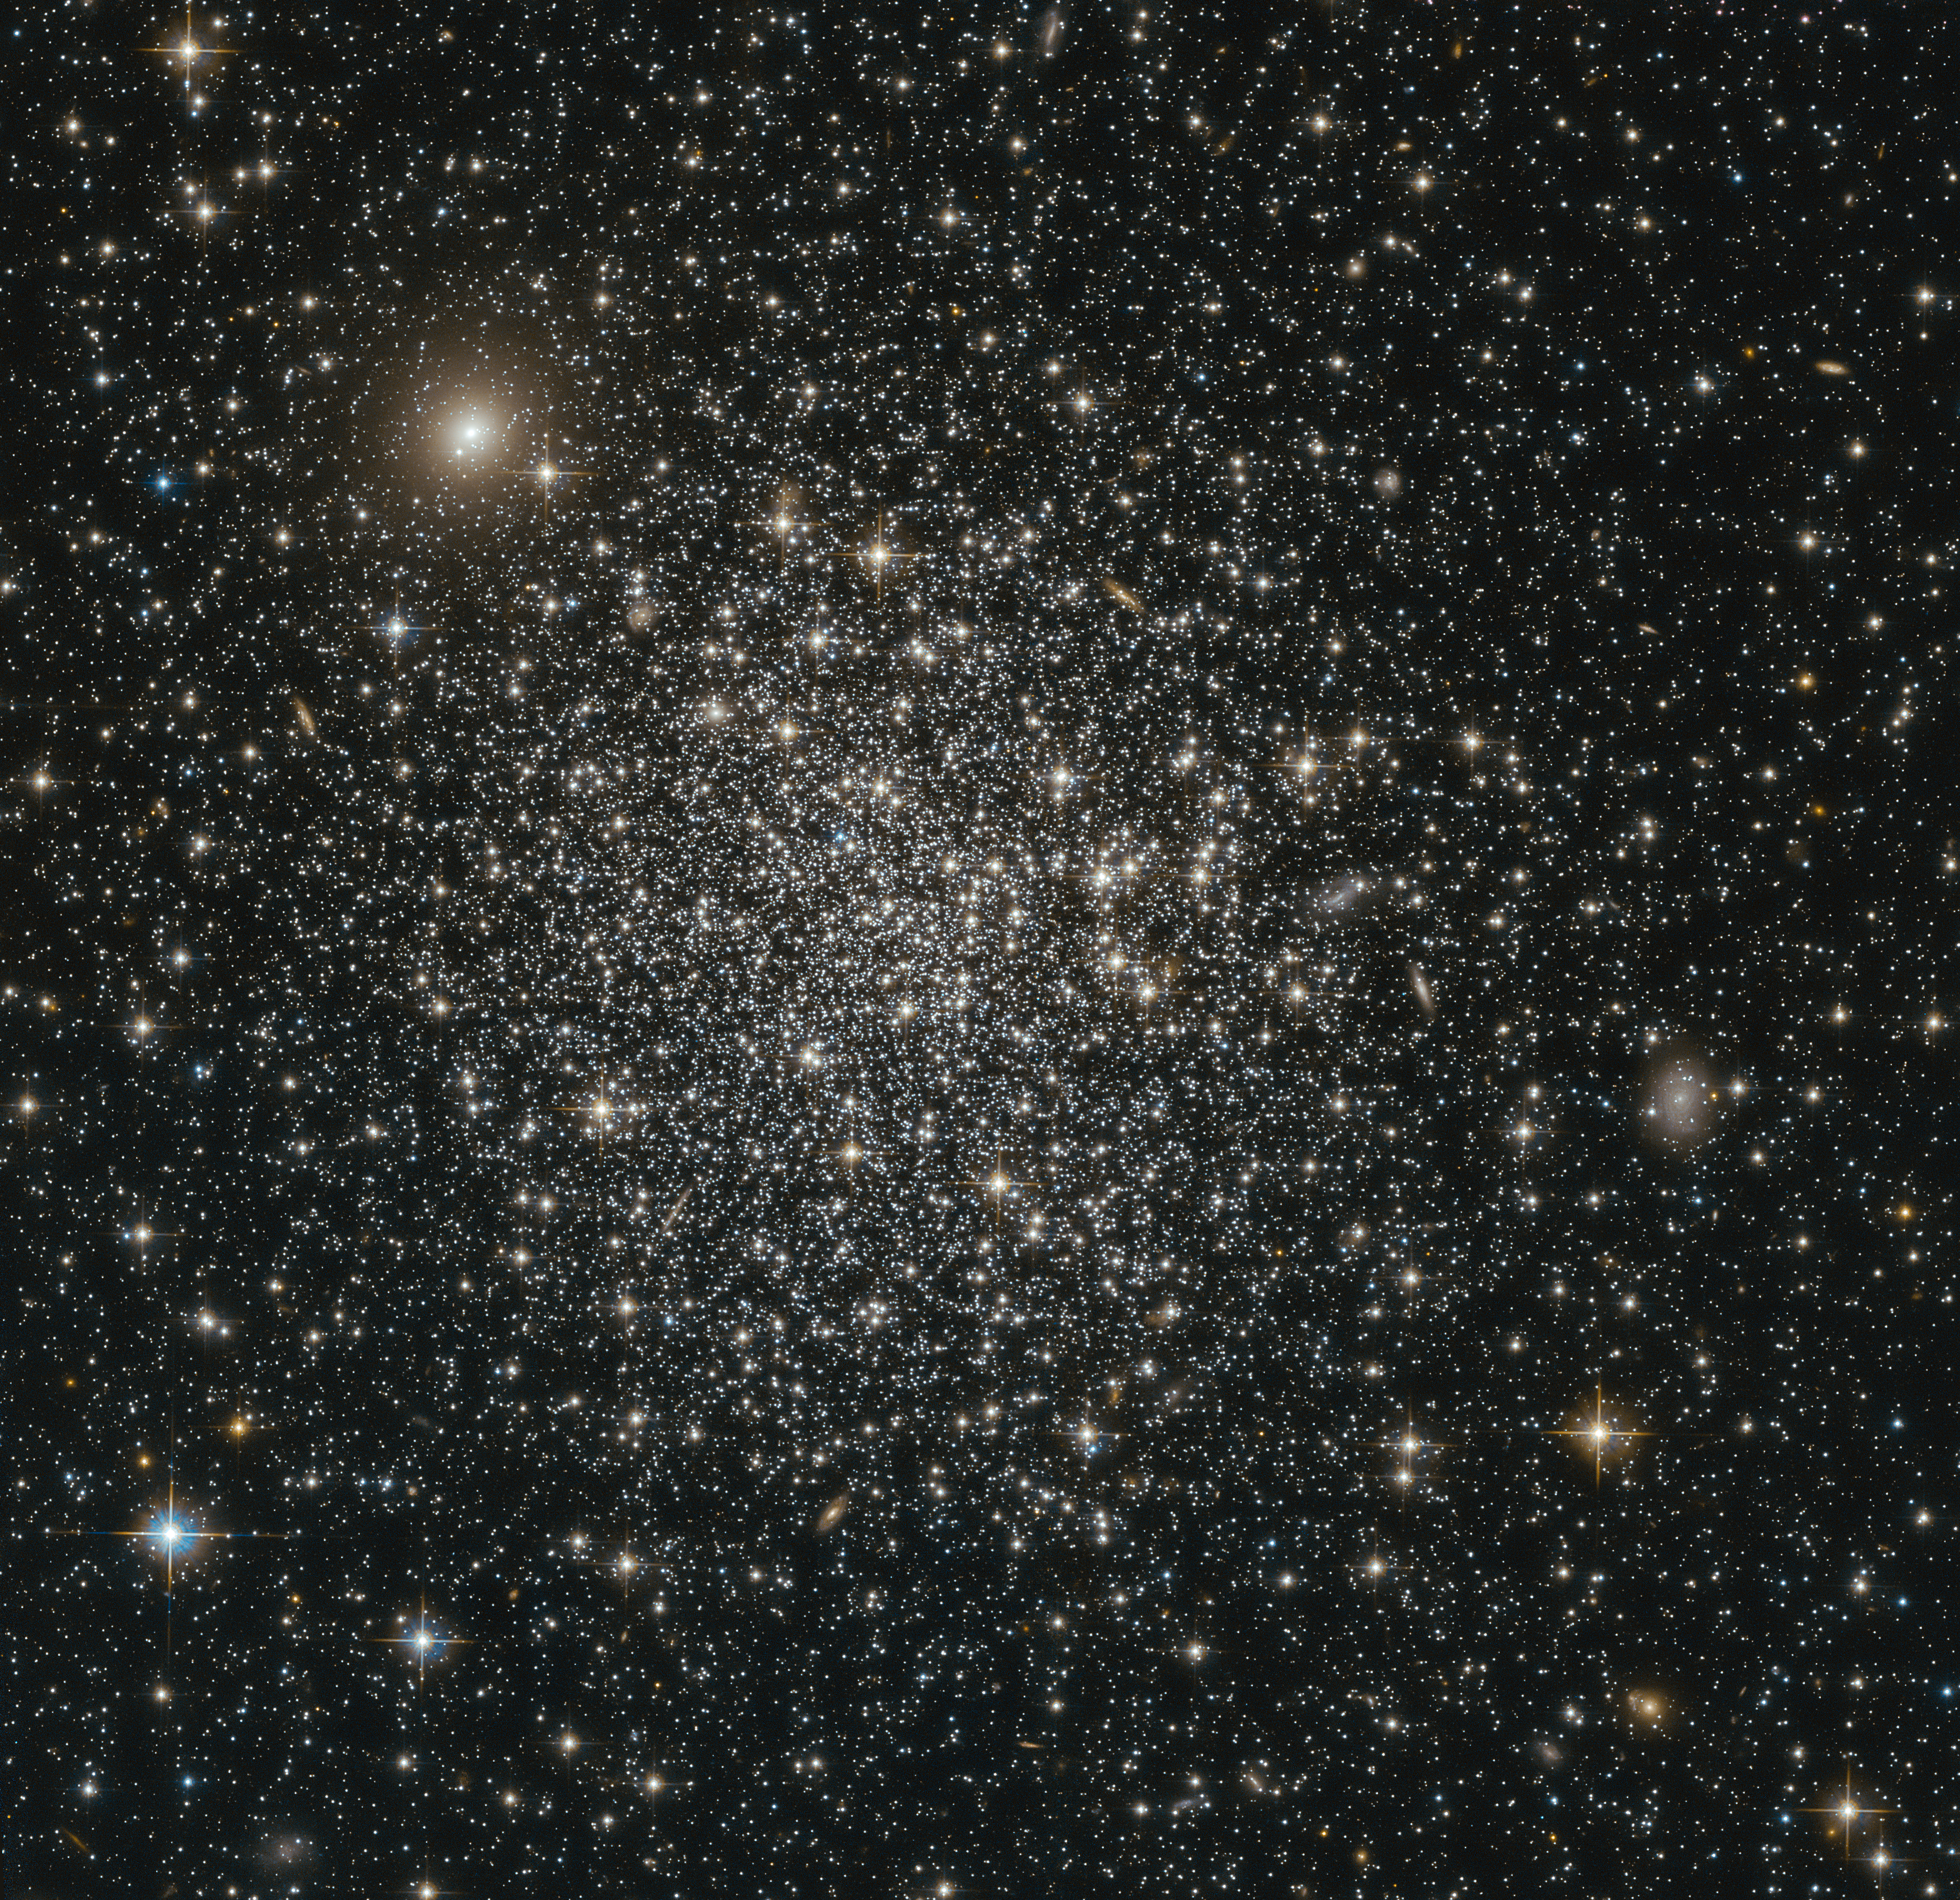

A glittering sphere of stars

This NASA/ESA Hubble Space Telescope image reveals the simple beauty of NGC 339, a massive intermediate age star cluster in the southern constellation of Tucana (The Toucan).

NGC 339 is part of the Small Magellanic Cloud (SMC), a dwarf galaxy that lies around 200 000 light-years away from us. Along with our own galaxy, the Milky Way, the SMC is one of a collection of neighbouring galaxies known as the Local Group.

By measuring the brightnesses and colours of the stars of NGC 339, astronomers were able to estimate the overall age of the cluster — a method that places NGC 339 at around 6.5 billion years old. This makes it only half the age of the more common globular clusters. The relationship between massive intermediate age star clusters, such as NGC 339, and the true globular clusters are not fully understood yet. So far none of these type of clusters has been found in the Milky Way.

In this very detailed image, it is also possible to see a number of galaxies. They appear as fuzzy, extended blobs, contrasting with the sharp stars that make up NGC 339. Most obvious here are two elliptical galaxies, one towards the top left of the image and another in the centre right. These galaxies are not associated with NGC 339 but lie far in the background, across the vast expanse of the cosmos.

Credit: ESA/Hubble & NASA Acknowledgement: Judy Schmidt (Geckzilla)